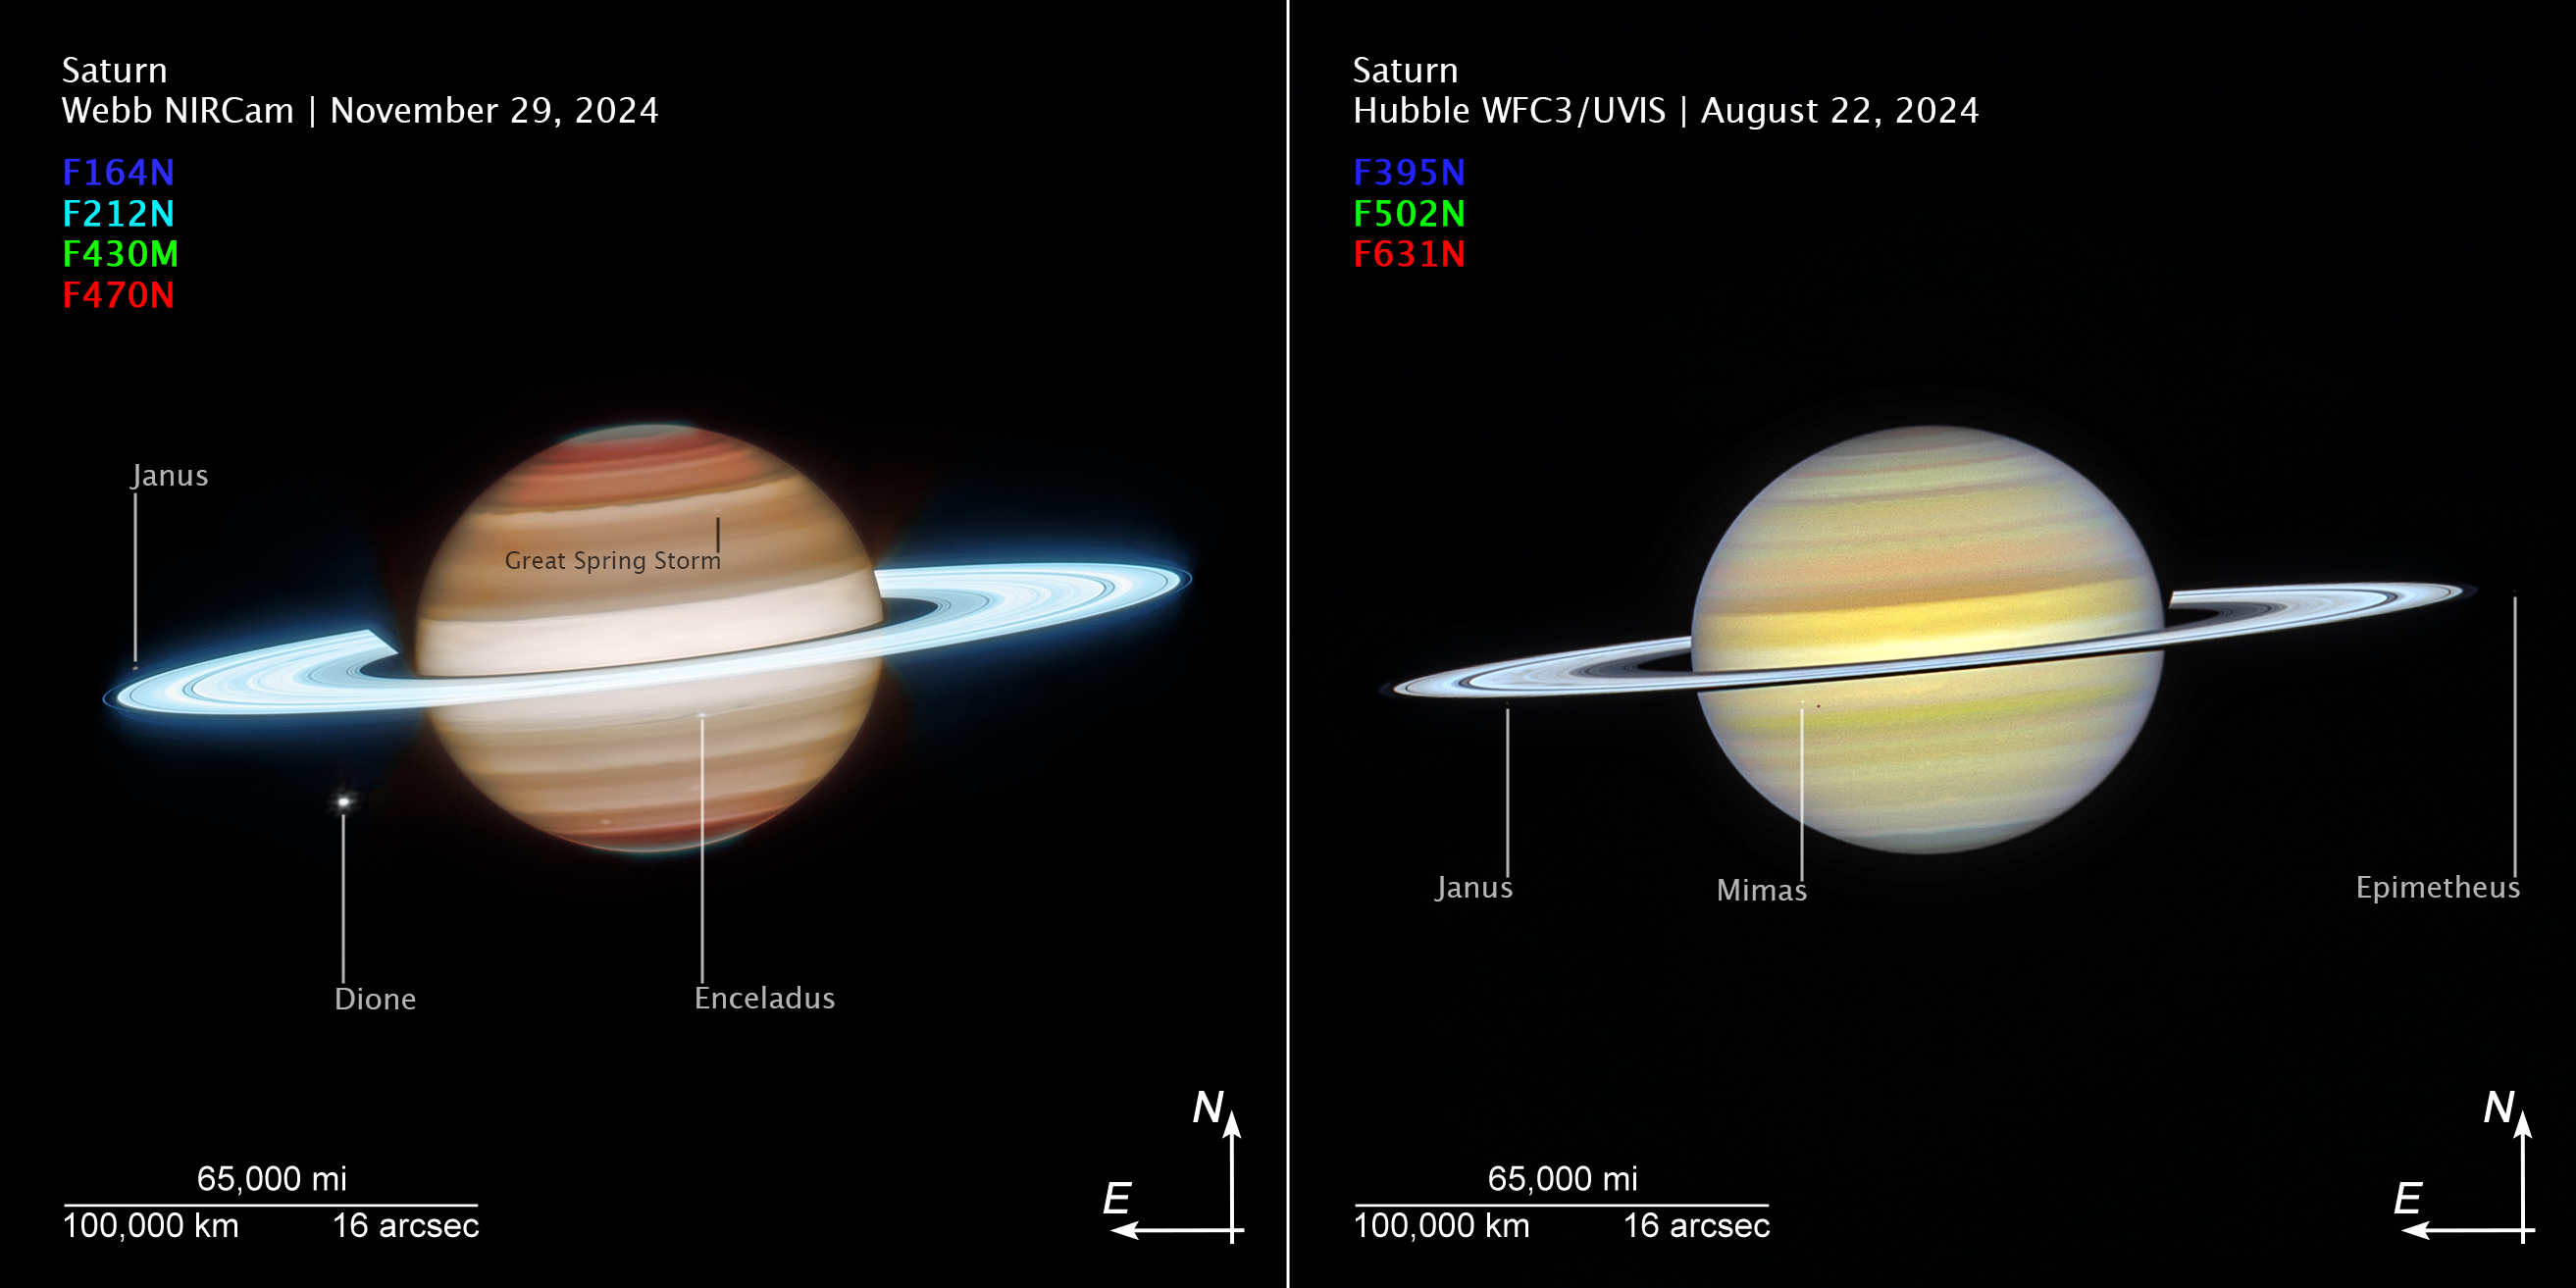

Saturn (2024 Webb and Hubble images, annotated compass image)

These images of Saturn, captured by the NASA/ESA/CSA James Webb and NASA/ESA Hubble Space Telescopes, show compass arrows, scale bar, and colour key for reference.

The north and east compass arrows show the orientation of the image on the sky. Note that the relationship between north and east on the sky (as seen from below) is flipped relative to direction arrows on a map of the ground (as seen from above).

The scale bar is labeled in miles, kilometres, and arcseconds.

These images show invisible near-infrared and visible wavelengths of light with their colour assignments. The colour key shows which filters were used when collecting the light. The colour of each filter name is the visible light colour used to represent the light that passes through that filter.

Credit: NASA, ESA, CSA, STScI, A. Simon (NASA-GSFC), M. Wong (University of California); Image Processing: J. DePasquale (STScI)